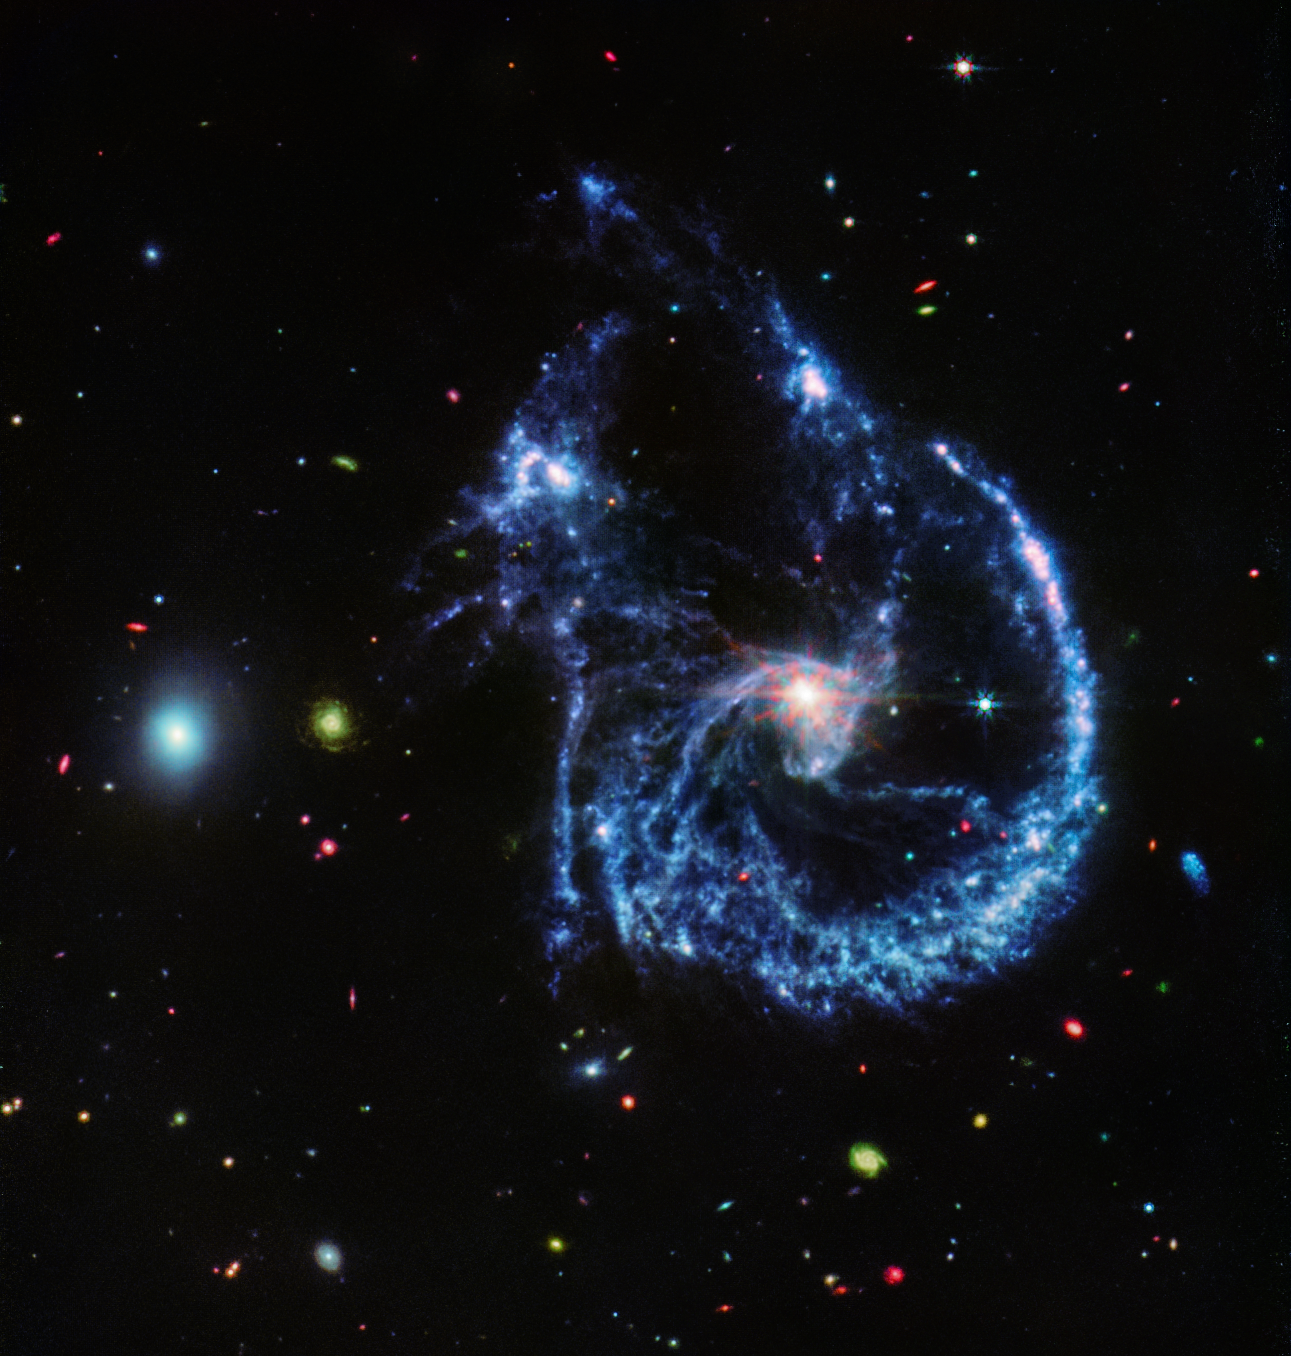

Arp 107 MIRI image

This image of Arp 107, obtained by Webb’s MIRI (Mid-InfraRed Instrument), reveals the supermassive black hole that lies in the centre of the large spiral galaxy to the right, as evidenced by the small, bright central ‘core’. This bright core, where the black hole is pulling much of the dust into lanes, also features Webb’s characteristic diffraction spikes, caused by the light that it emits interacting with the structure of the telescope itself.

Perhaps the defining feature of the region, which MIRI reveals, are the millions of young stars that are forming, highlighted in blue. These stars are surrounded by dusty silicates and soot-like molecules known as polycyclic aromatic hydrocarbons. The small elliptical galaxy to the left, which has already completed much of its star formation, is composed of many of these organic molecules.

Credit: NASA, ESA, CSA, STScI